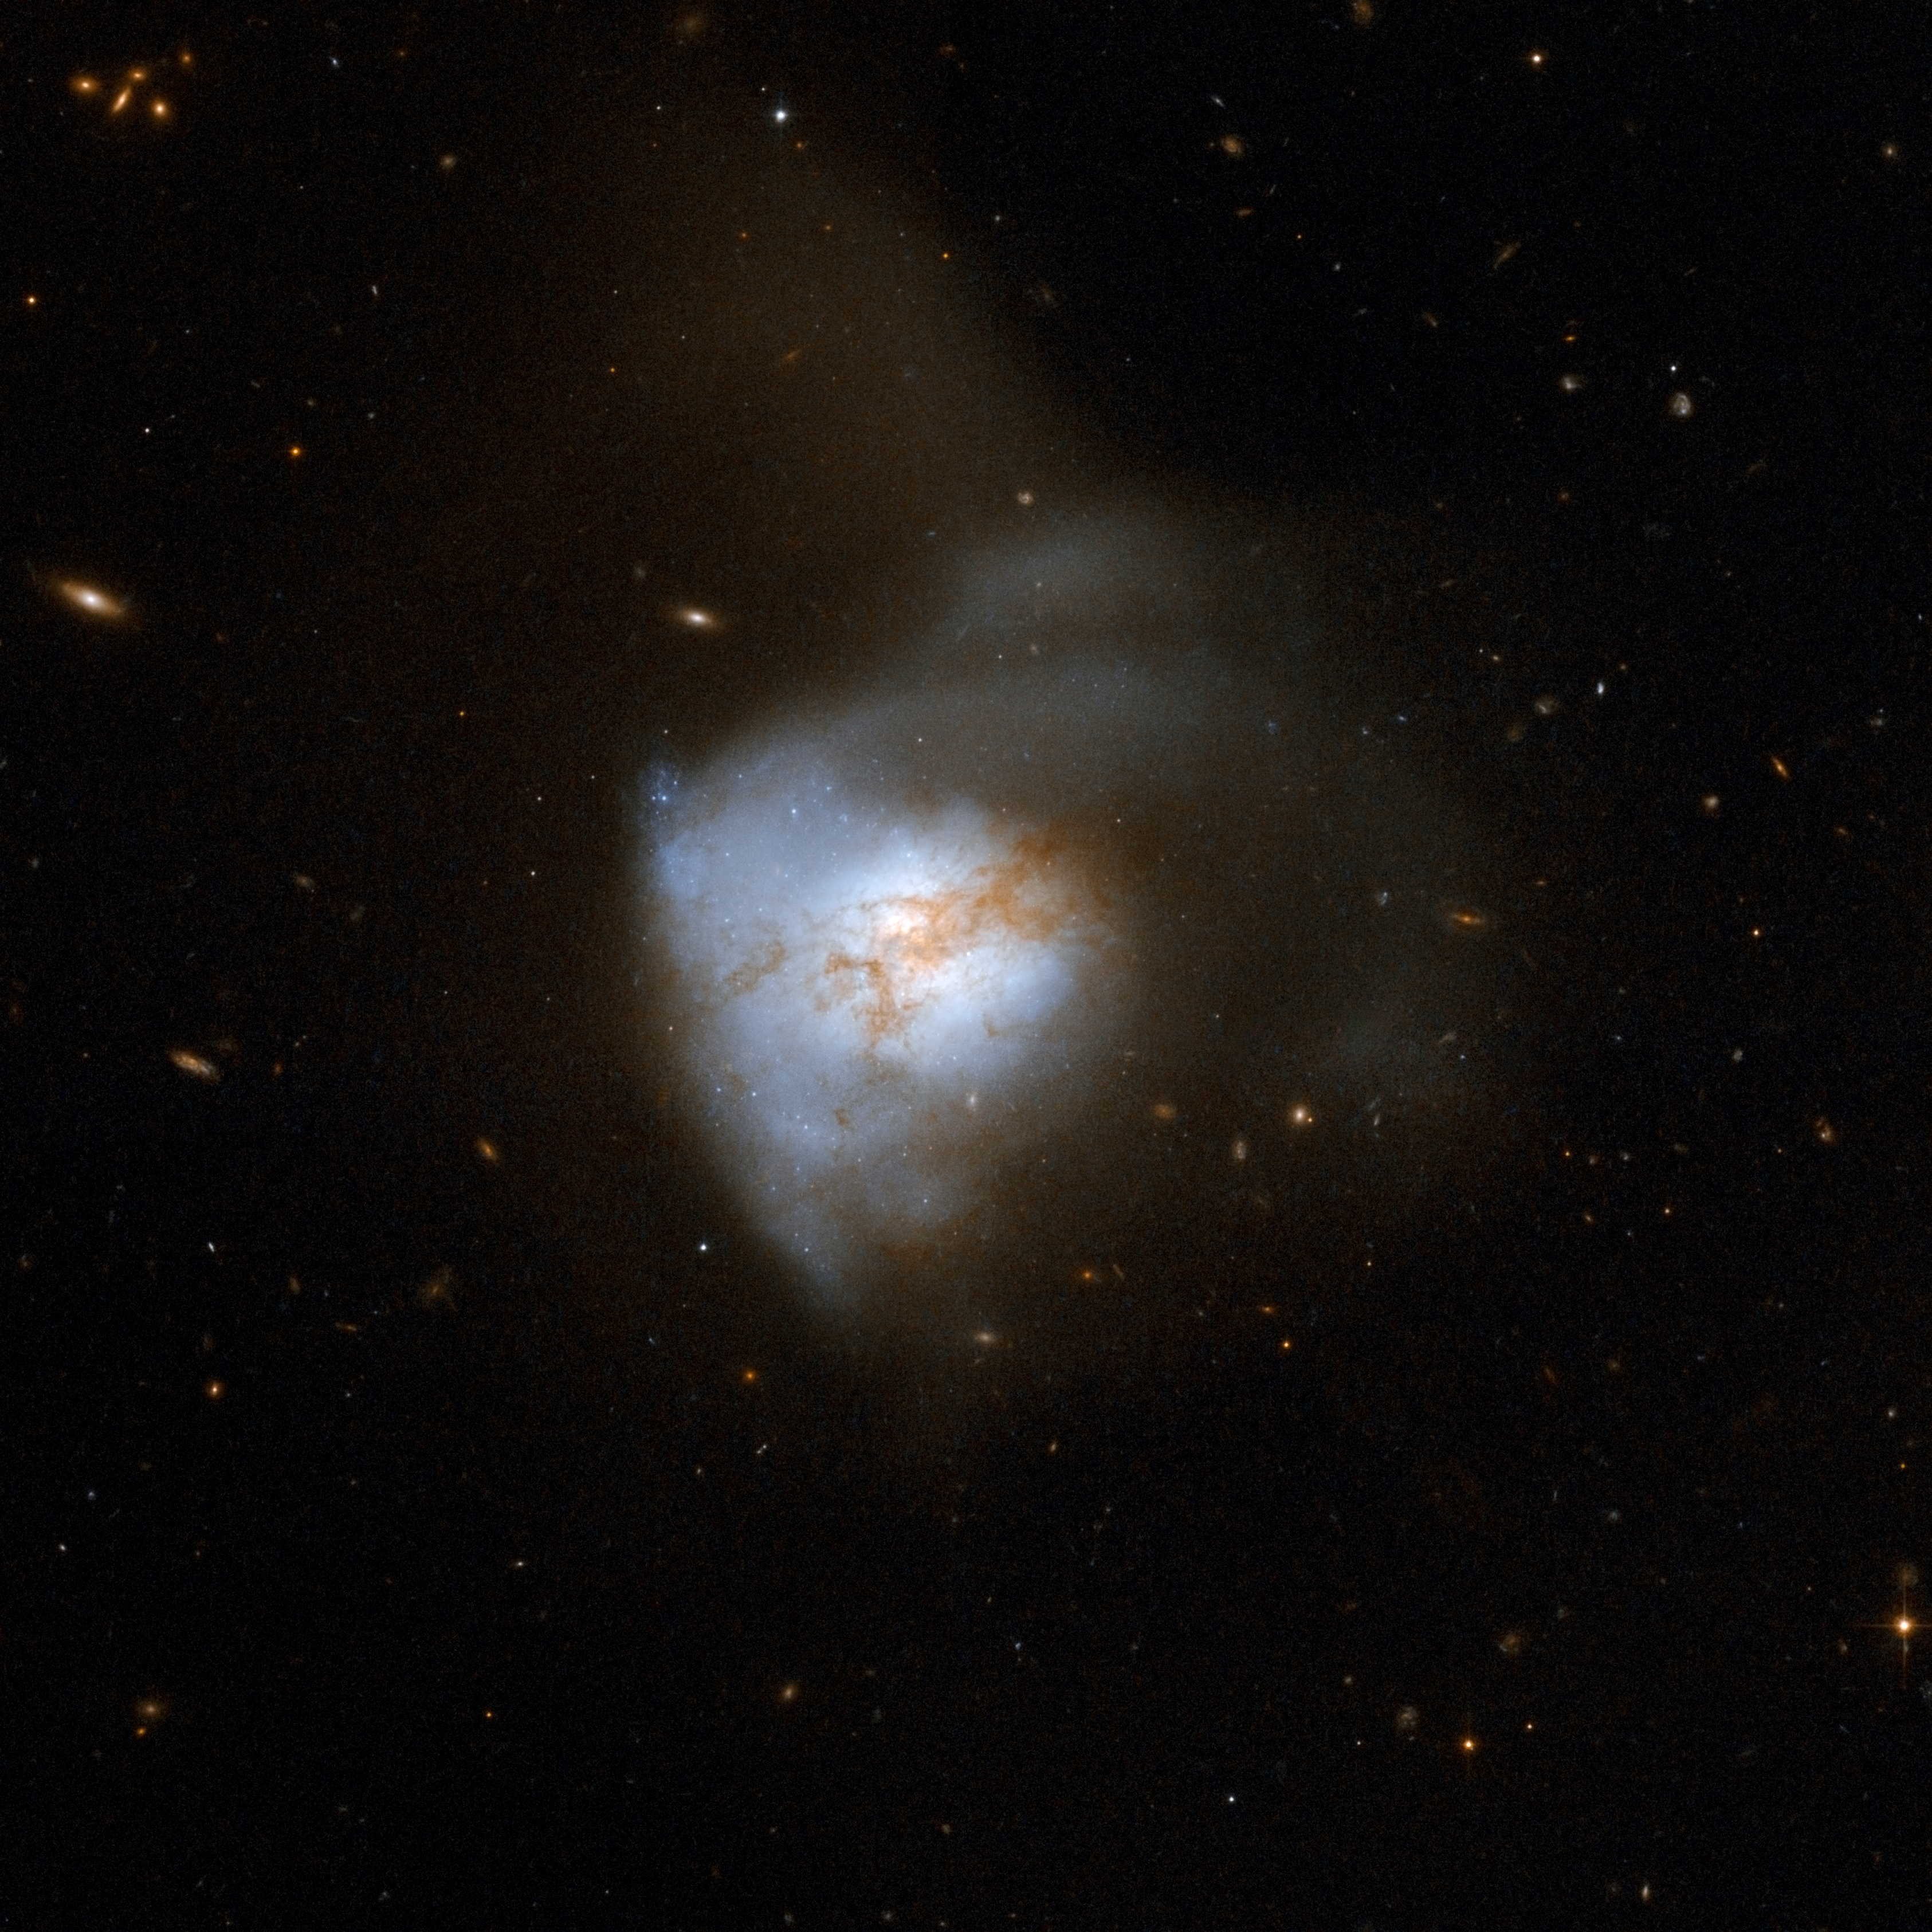

Arp 220

Arp 220 appears to be a single, odd-looking galaxy, but is in fact a nearby example of the aftermath of a collision between two spiral galaxies. It is the brightest of the three galactic mergers closest to Earth, about 250 million light-years away in the constellation of Serpens, the Serpent. The collision, which began about 700 million years ago, has sparked a cracking burst of star formation, resulting in about 200 huge star clusters in a packed, dusty region about 5,000 light-years across (about 5 percent of the Milky Way's diameter). The amount of gas in this tiny region equals the amount of gas in the entire Milky Way Galaxy. The star clusters are the bluish-white bright knots visible in the Hubble image. Arp 220 glows brightest in infrared light and is an ultraluminous infrared galaxy. Previous Hubble observations, taken in the infrared at a wavelength that looks through the dust, have uncovered the cores of the parent galaxies 1,200 light-years apart. Observations with NASA's Chandra X-ray Observatory have also revealed X-rays coming from both cores, indicating the presence of two supermassive black holes. Arp 220 is the 220th galaxy in Arp's Atlas of Peculiar Galaxies.

This image is part of a large collection of 59 images of merging galaxies taken by the Hubble Space Telescope and released on the occasion of its 18th anniversary on 24th April 2008.

Credit: NASA, ESA, the Hubble Heritage Team (STScI/AURA)-ESA/Hubble Collaboration and A. Evans (University of Virginia, Charlottesville/NRAO/Stony Brook University)